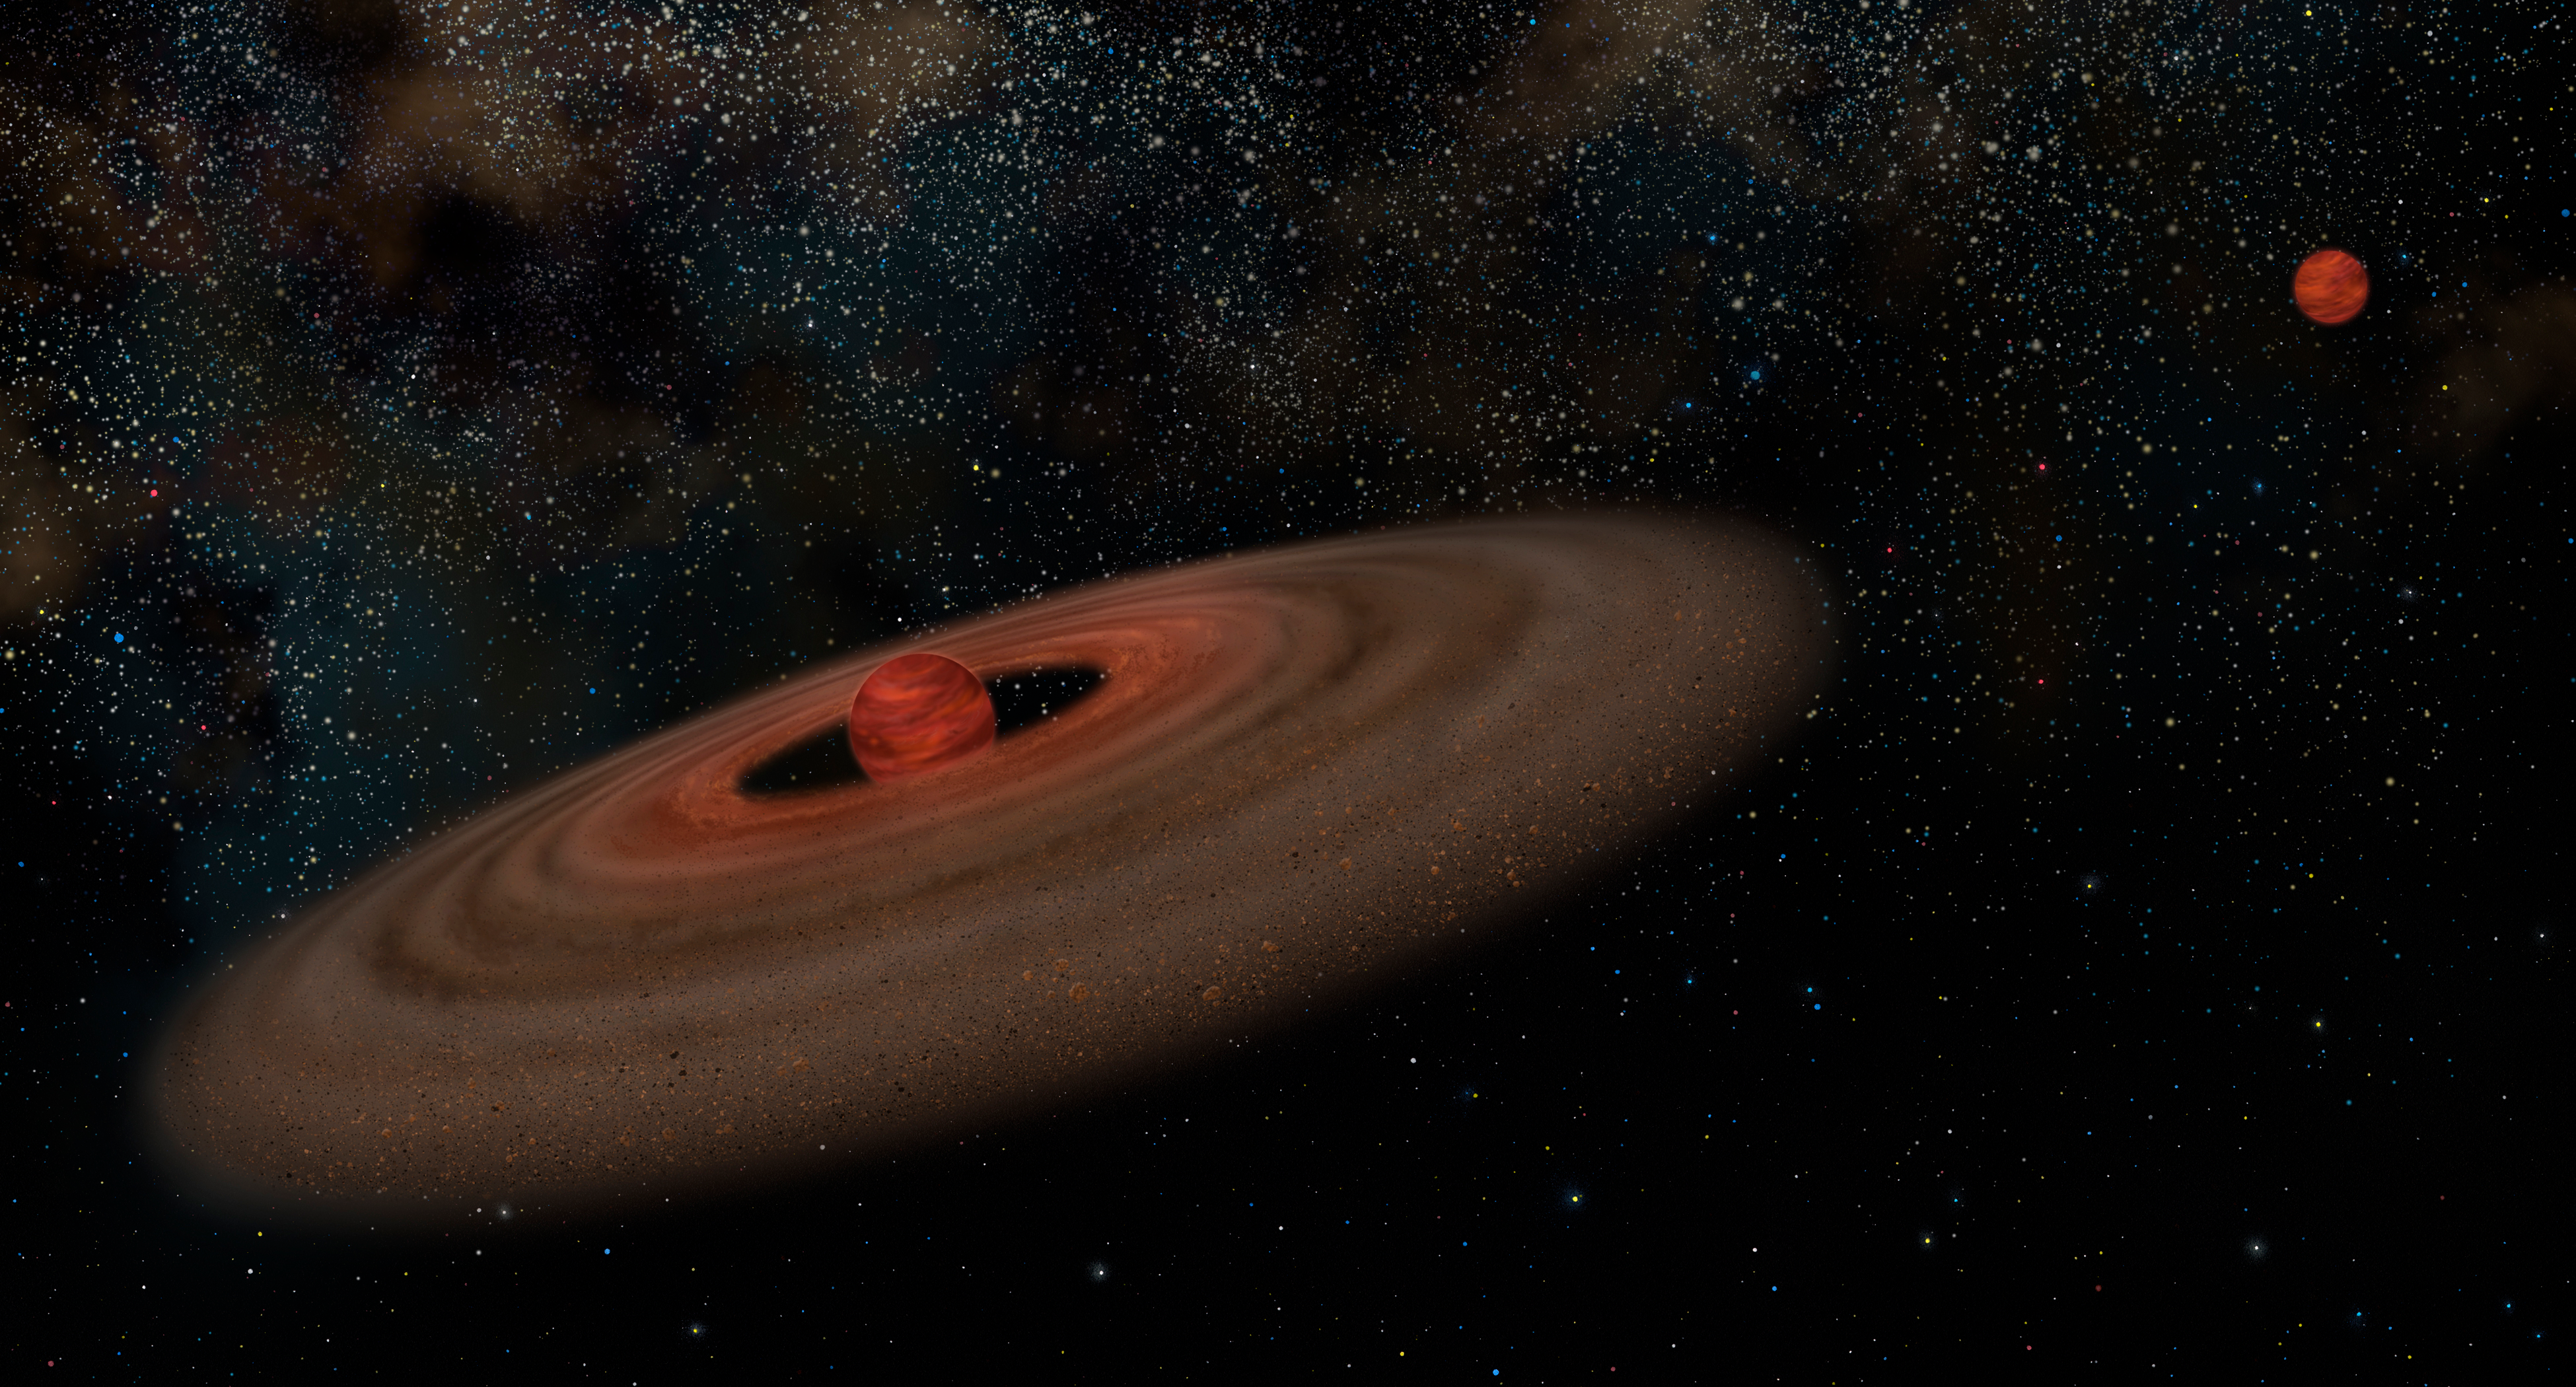

Binary system 2M J044144 (artist's impression)

This is an artist's impression of the binary system 2M J044144 showing the primary brown dwarf that is estimated to be approximately 20 times the mass of Jupiter (at left) and its companion that is estimated to be 7 times the mass of Jupiter (at right). The disk of the primary likely never had enough material to make a companion of this mass. As a result, this small companion probably formed like a binary star. In this illustration, both objects are presented at the same distance to show relative sizes. Not shown are two other nearby objects, a low-mass star and a brown dwarf that are probably both parts of this system.

Credit: NASA, ESA, K. Todorov and K. Luman (Penn State University)